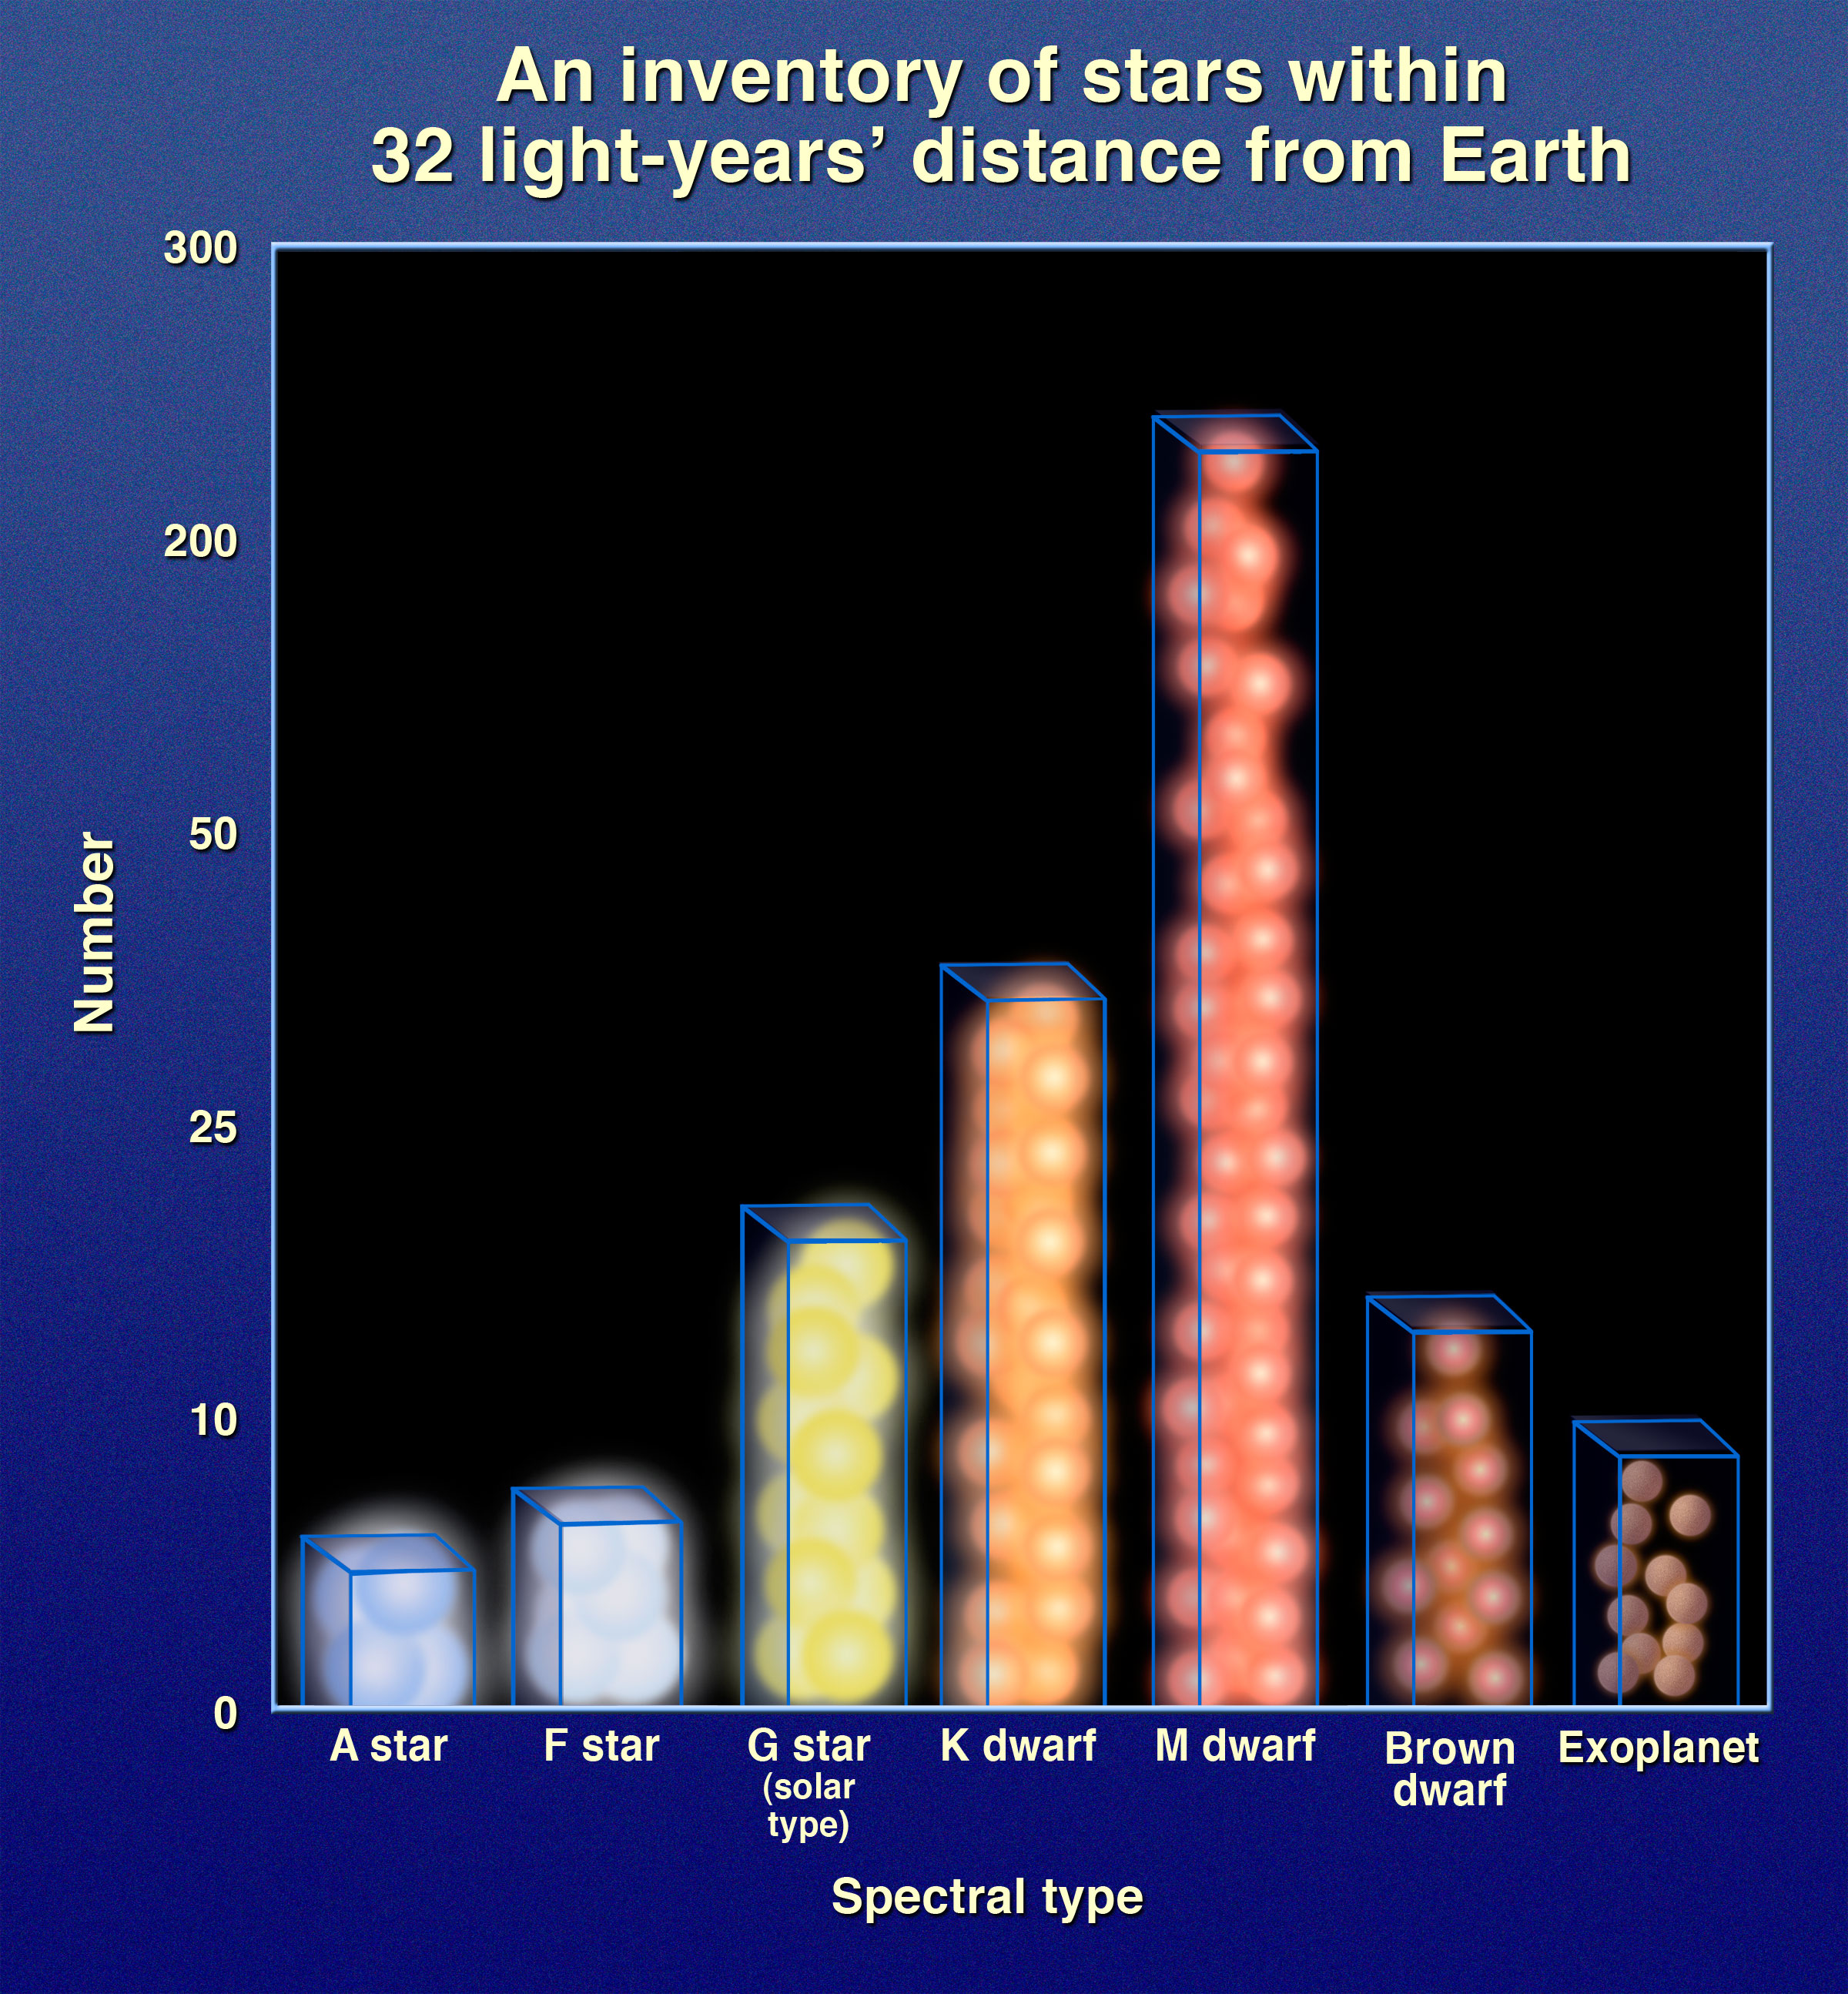

Graphic of number of stars vs. spectral type within 32 light-years of Earth

This diagram shows the various stellar populations within 32 light-years of Earth as measured by the RECONS survey. The largest population consists of red dwarfs, but the population of slightly lower mass brown dwarfs drops off precipitously. This is known as the "brown dwarf desert".

Credit: NASA, ESA and A. Feild (STScI)